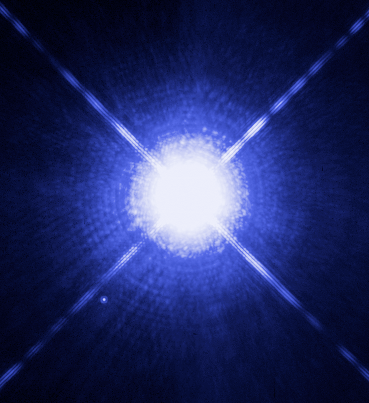

The Dog Star, Sirius A, and its tiny companion

This Hubble Space Telescope image shows Sirius A, the brightest star in our nighttime sky, along with its faint, tiny stellar companion, Sirius B. Astronomers overexposed the image of Sirius A [at centre] so that the dim Sirius B [tiny dot at lower left] could be seen. The cross-shaped diffraction spikes and concentric rings around Sirius A, and the small ring around Sirius B, are artifacts produced within the telescope's imaging system. The two stars revolve around each other every 50 years. Sirius A, only 8.6 light-years from Earth, is the fifth closest star system known.

Sirius B, a white dwarf, is very faint because of its tiny size, only 12,000 kilometres in diameter. White dwarfs are the leftover remnants of stars similar to our Sun. They have exhausted their nuclear fuel sources and have collapsed down to a very small size. Sirius B is about 10,000 times fainter than Sirius A. The white dwarf's feeble light makes it a challenge to study, because its light is swamped in the glare of its brighter companion as seen from telescopes on Earth. However, using the keen eye of Hubble's Space Telescope Imaging Spectrograph (STIS), astronomers have now been able to isolate the light from Sirius B and disperse it into a spectrum. STIS measured light from Sirius B being stretched to longer, redder wavelengths due to the white dwarf's powerful gravitational pull. Based on those measurements, astronomers have calculated Sirius B's mass at 98 percent that of our Sun. Analysis of the white dwarf's spectrum also has allowed astronomers to refine the estimate for its surface temperature to about 25,000 C.

Accurately determining the masses of white dwarfs is fundamentally important to understanding stellar evolution. Our Sun will eventually become a white dwarf. White dwarfs are also the source of Type Ia supernova explosions, which are used to measure cosmological distances and the expansion rate of the universe. Measurements based on Type Ia supernovae are fundamental to understanding "dark energy" , a dominant repulsive force stretching the universe apart. Also, the method used to determine the white dwarf's mass relies on one of the key predictions of Einstein's theory of General Relativity: that light loses energy when it attempts to escape the gravity of a compact star.

This image was taken 15 Oct., 2003, with Hubble's Wide Field Planetary Camera 2. Based on detailed measurements of the position of Sirius B in this image, astronomers were then able to point the STIS instrument exactly on the white dwarf and make the measurements to determine its gravitational redshift and mass.

Credit: NASA, ESA, H. Bond (STScI), and M. Barstow (University of Leicester)